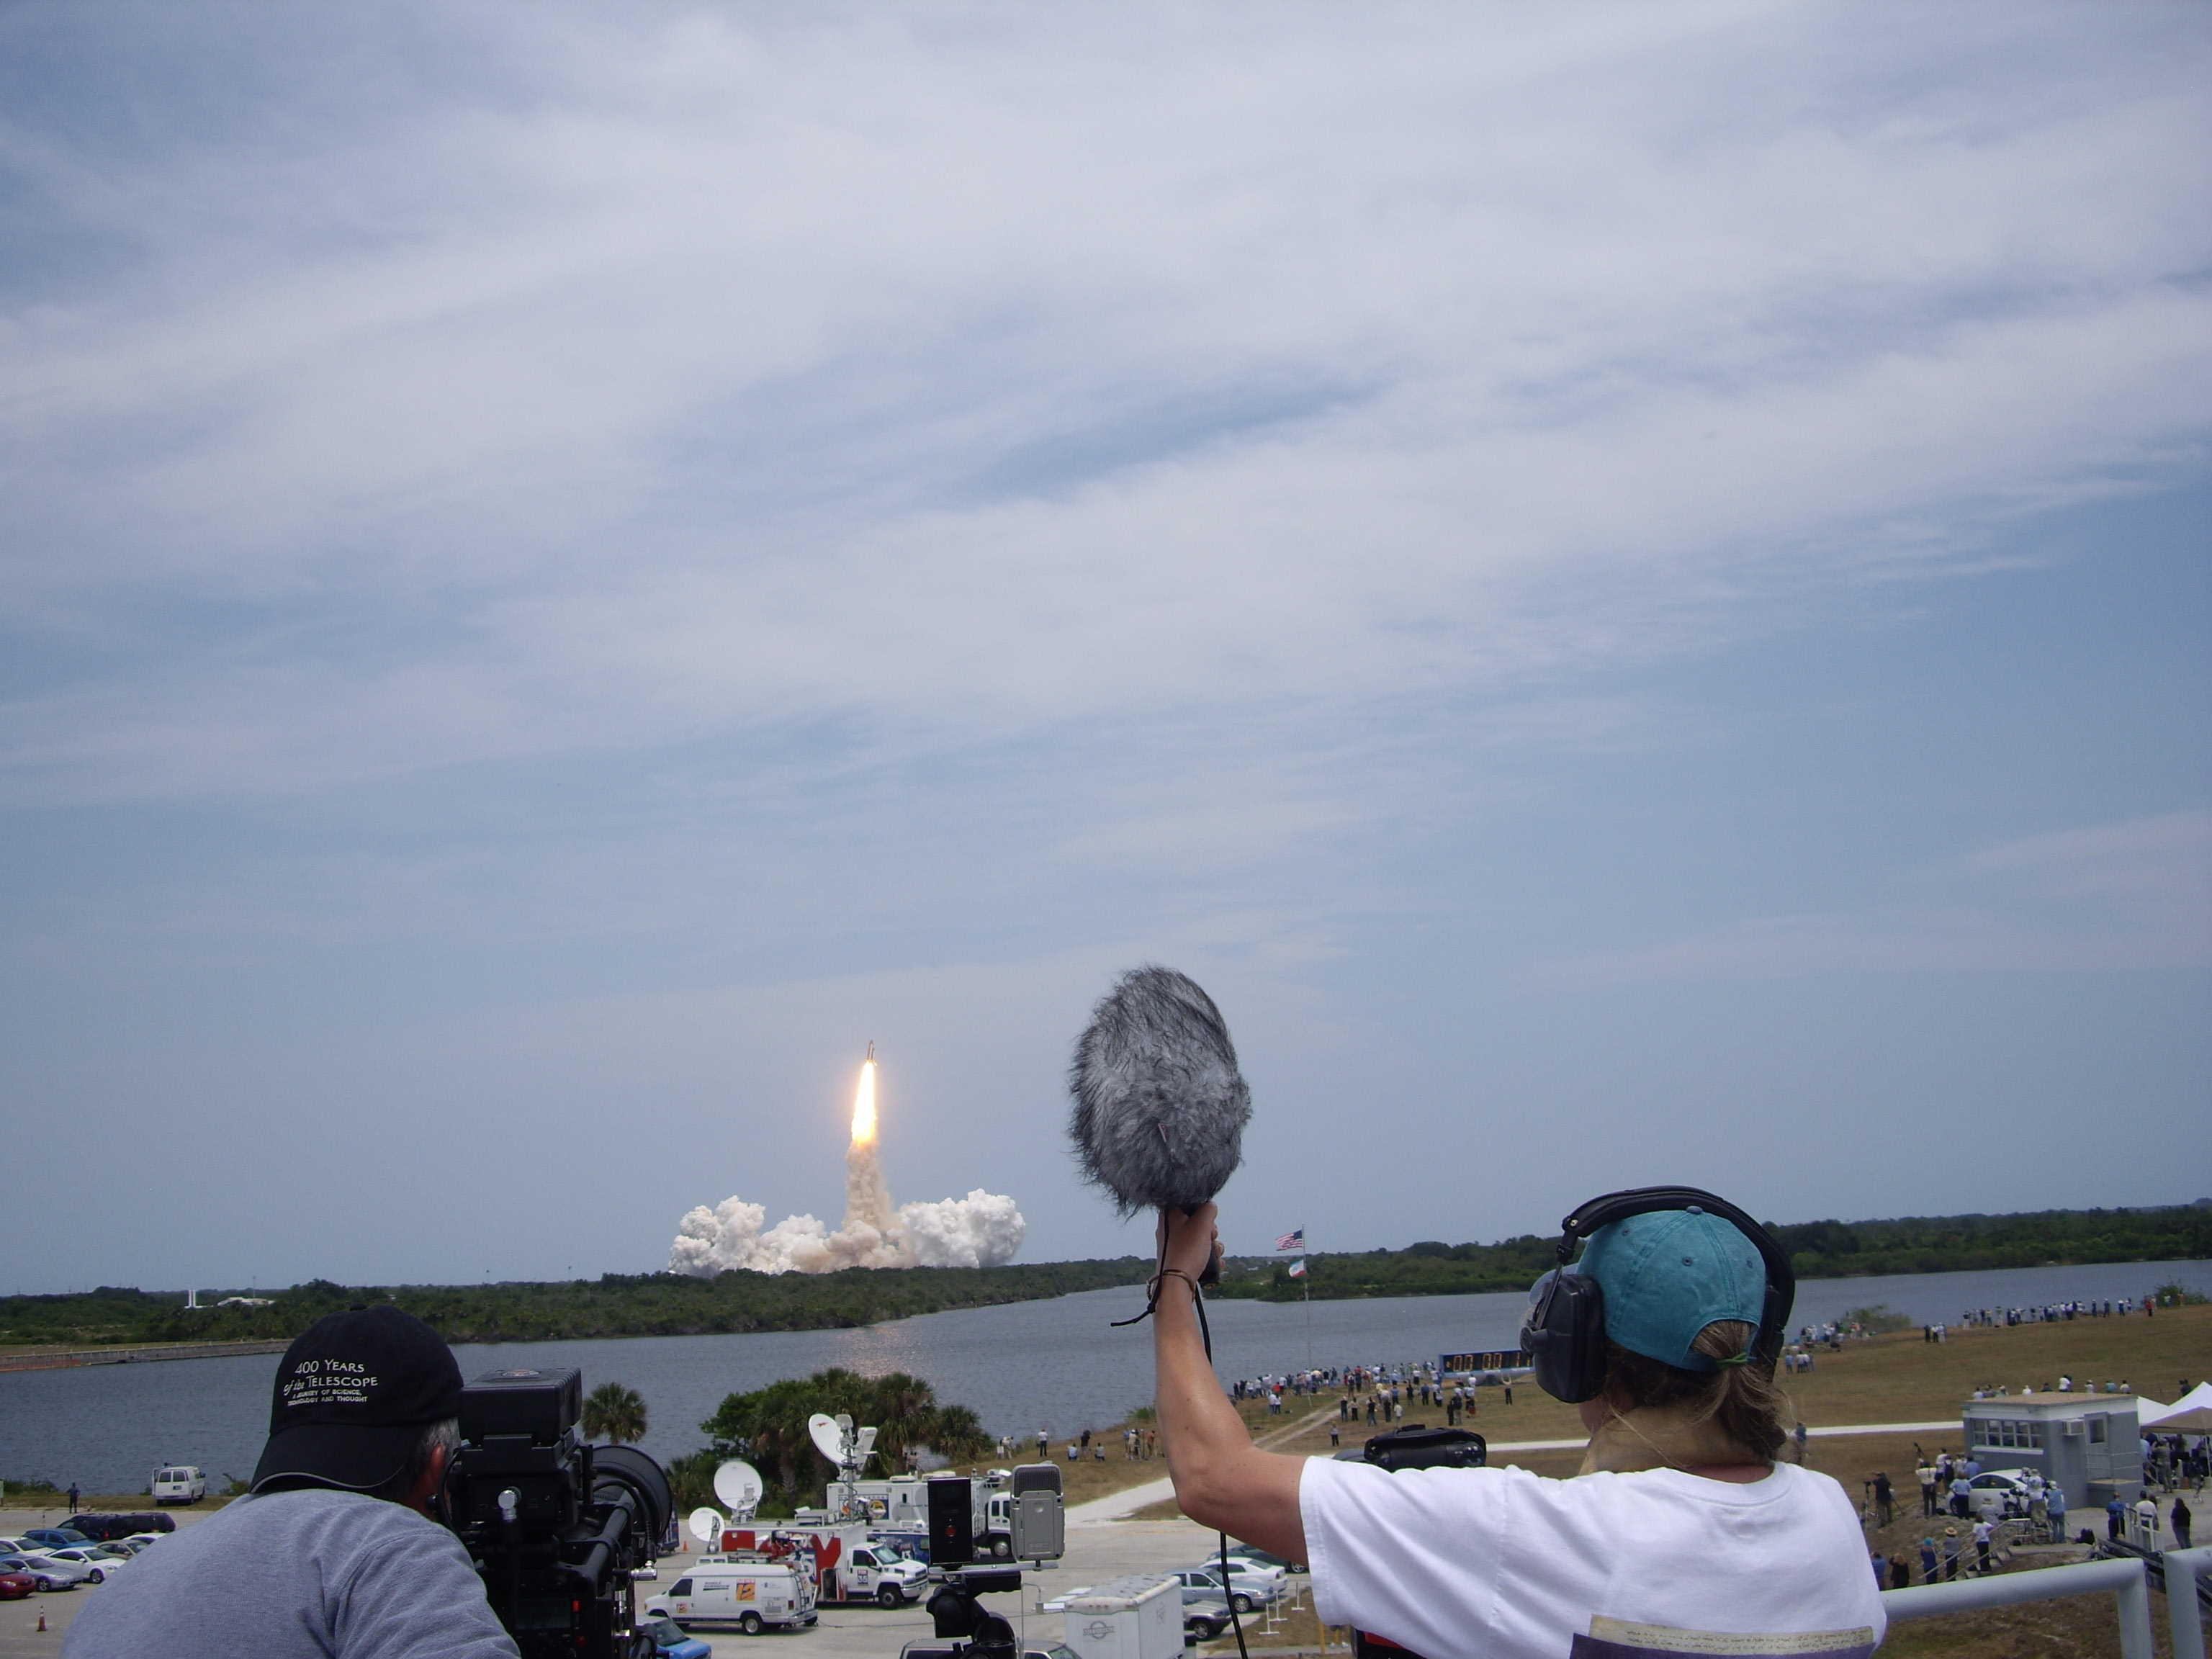

Space Shuttle Atlantis lifts off

This image of Space Shuttle Atlantis was taken from the press site at Kennedy Space Center. Atlantis launched at 2:01 p.m. EDT (20:01 CEST) on 11 May 2009 with its crew of seven to service the Hubble Space Telescope for the final time.

Credit: ESA/Hubble